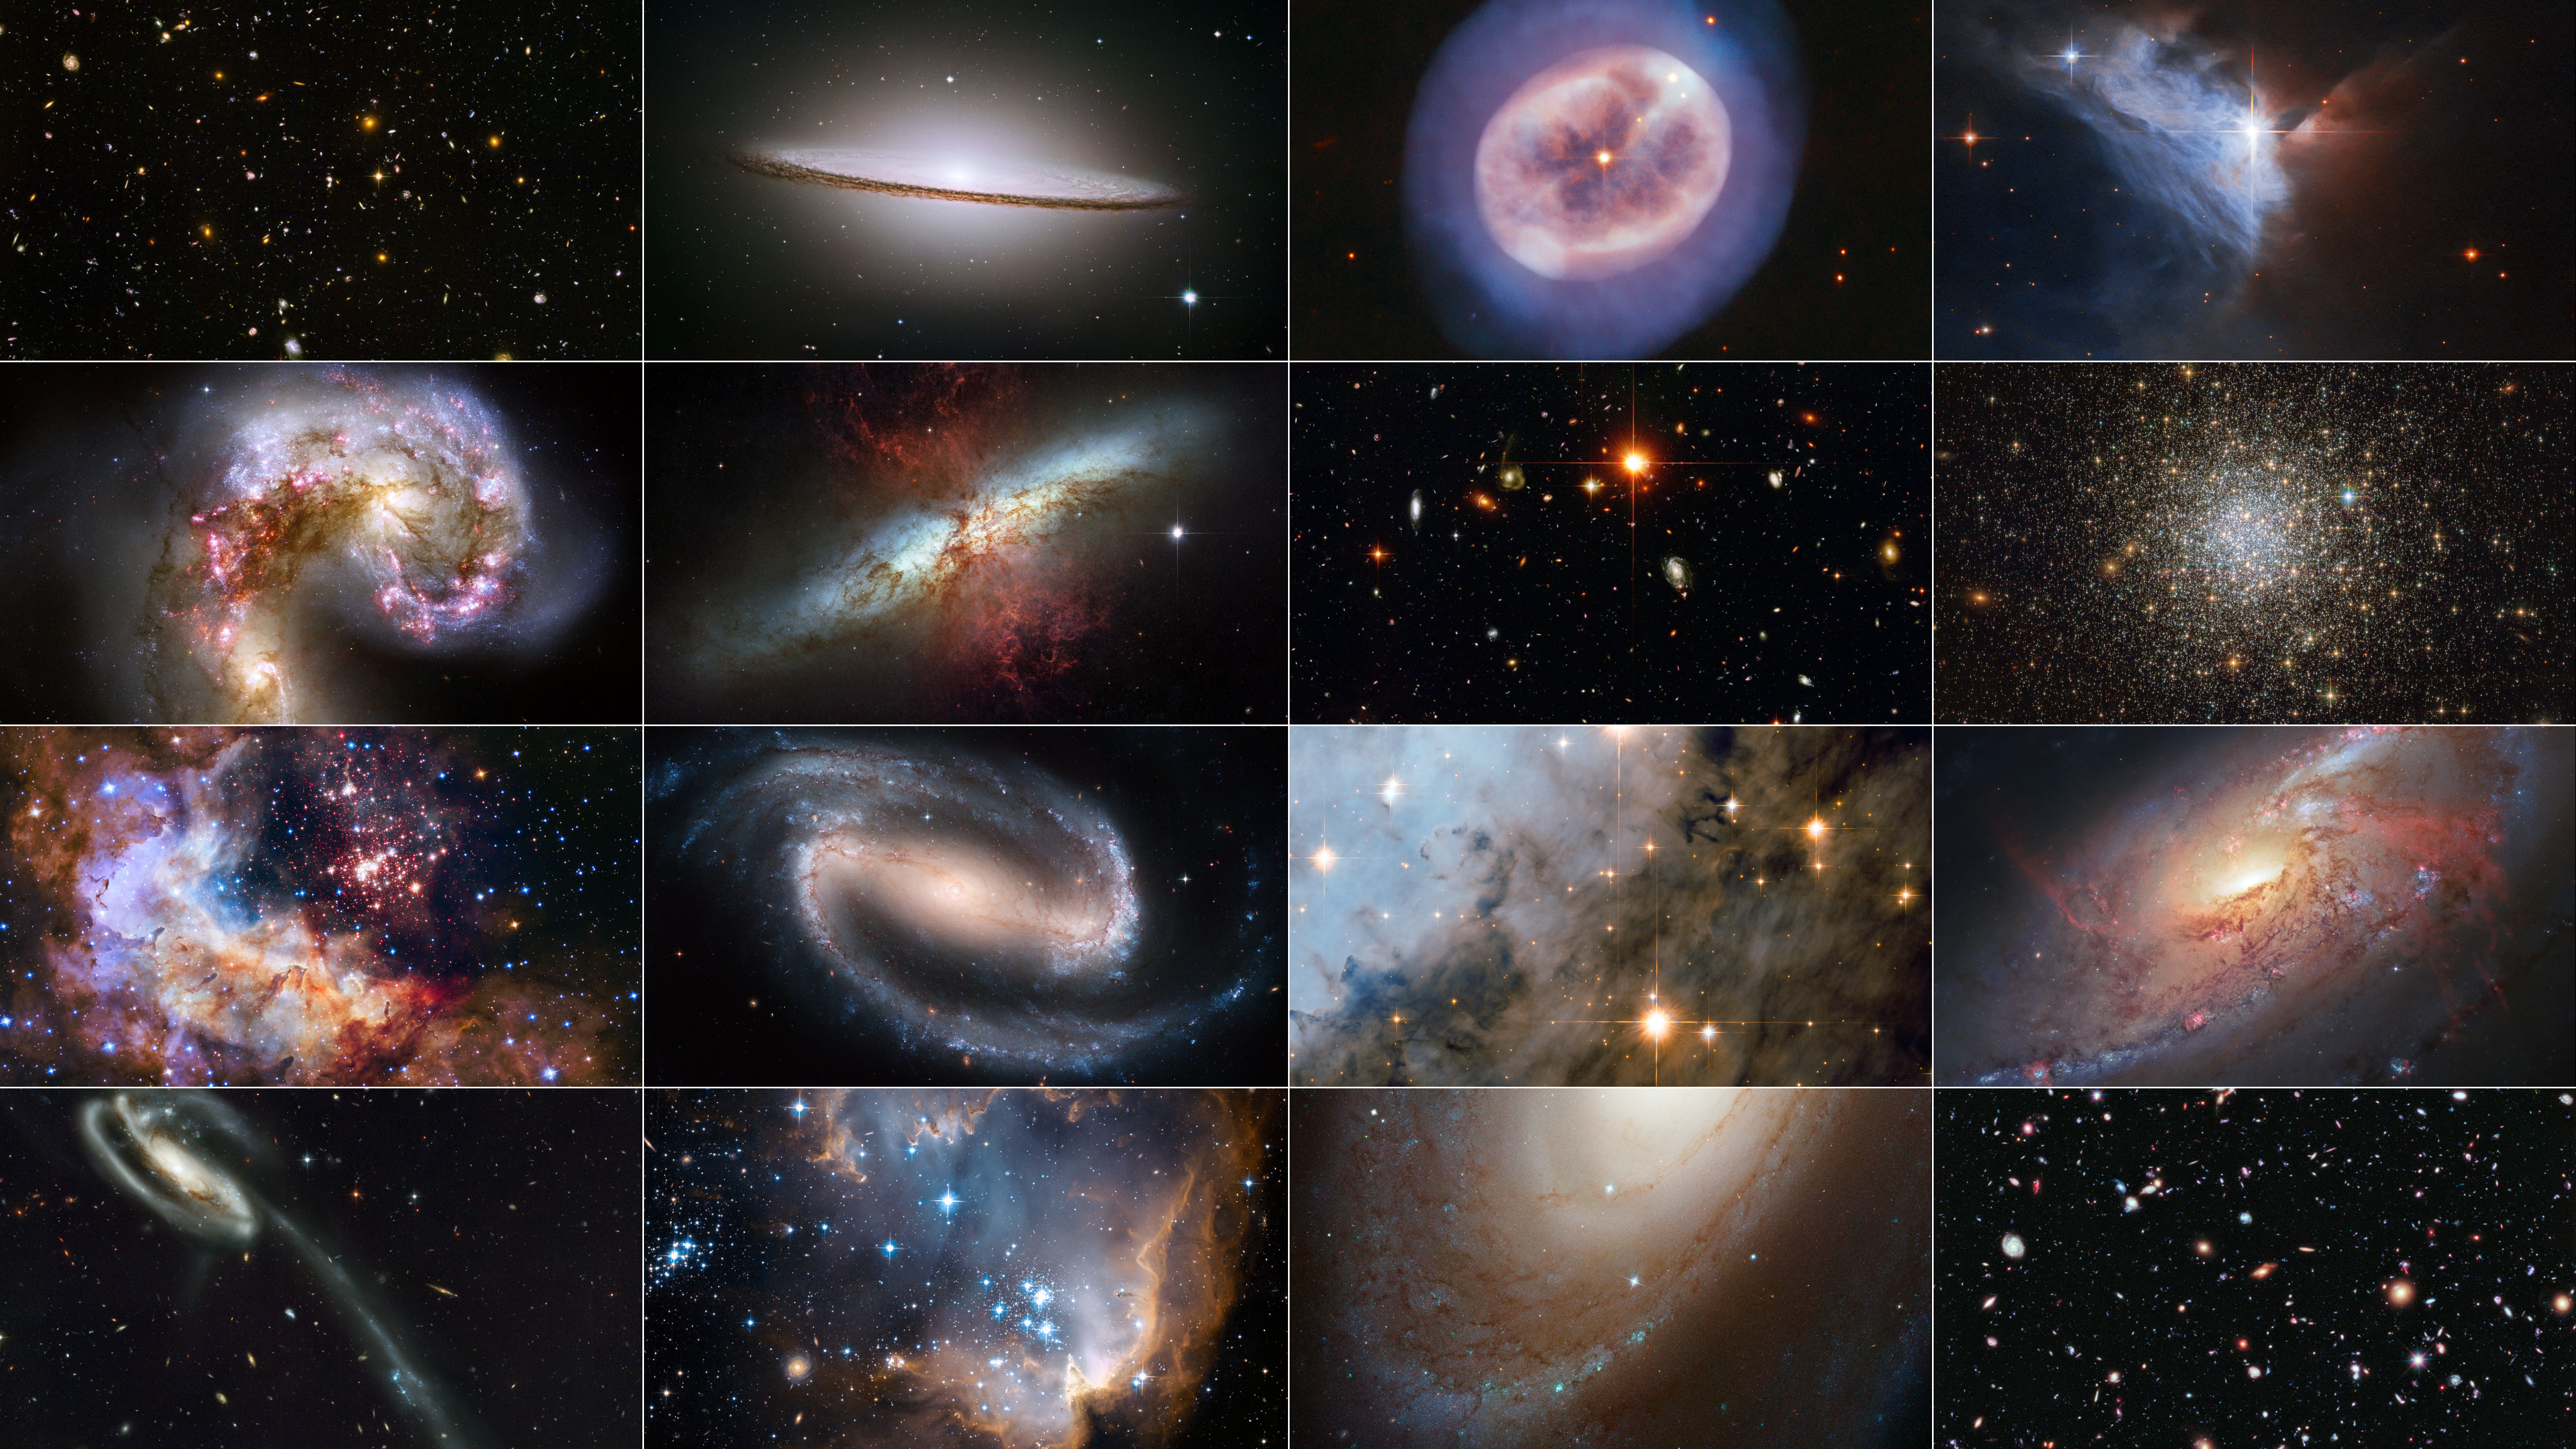

Collection of Hubble ACS Images

This collection of images features those taken by the NASA/ESA Hubble Space Telescope’s Advanced Camera for Surveys (ACS), which is marking 20 years of operation in March of 2022.

Credit: NASA, ESA